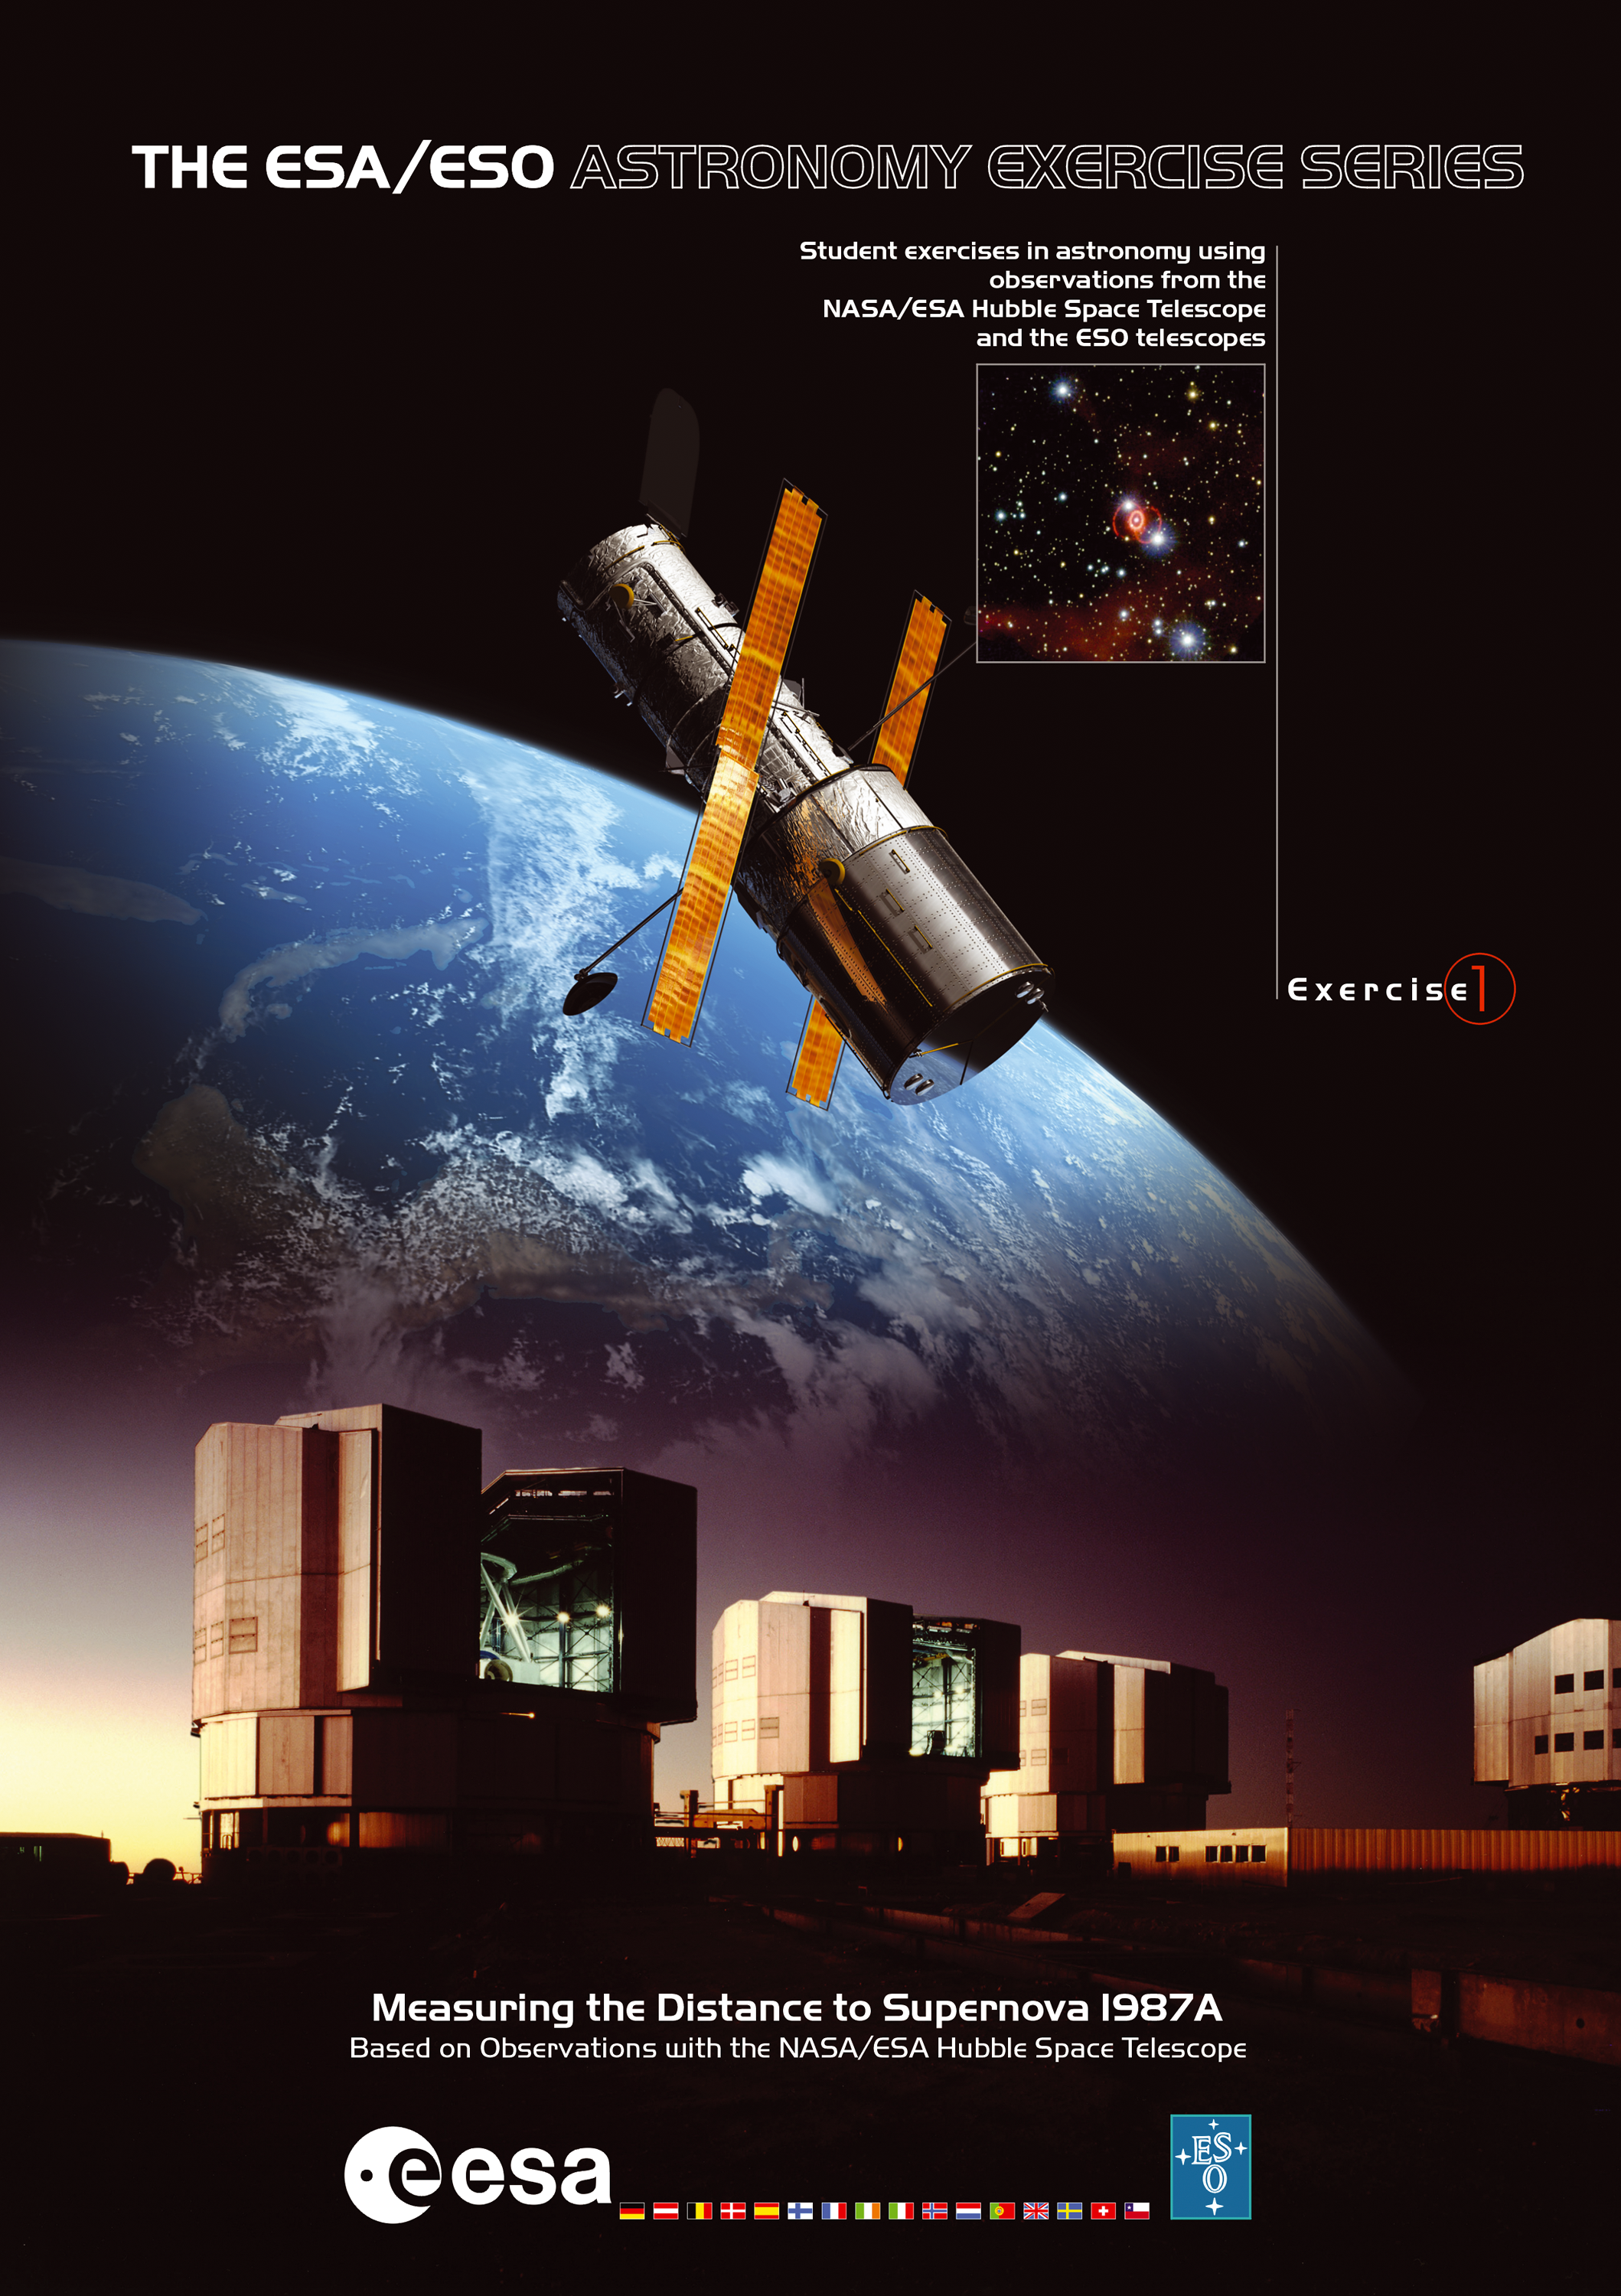

The cover of ESA/ESO Astronomy Exercise 1

The 'ESA/ESO Astronomy Exercise Series', allows students to gain exciting hands-on experience in astronomy by making realistic calculations with data obtained by the world's best telescopes. The students measure and calculate the distances and ages of astronomical objects, among the most basic problems in modern astrophysics, using observations made by the NASA/ESA Hubble Space Telescope and ESO's Very Large Telescope. This is the cover of Exercise 1: Measuring the Distance to Supernova 1987A.

Credit: The European Space Agency and the European Southern Observatory